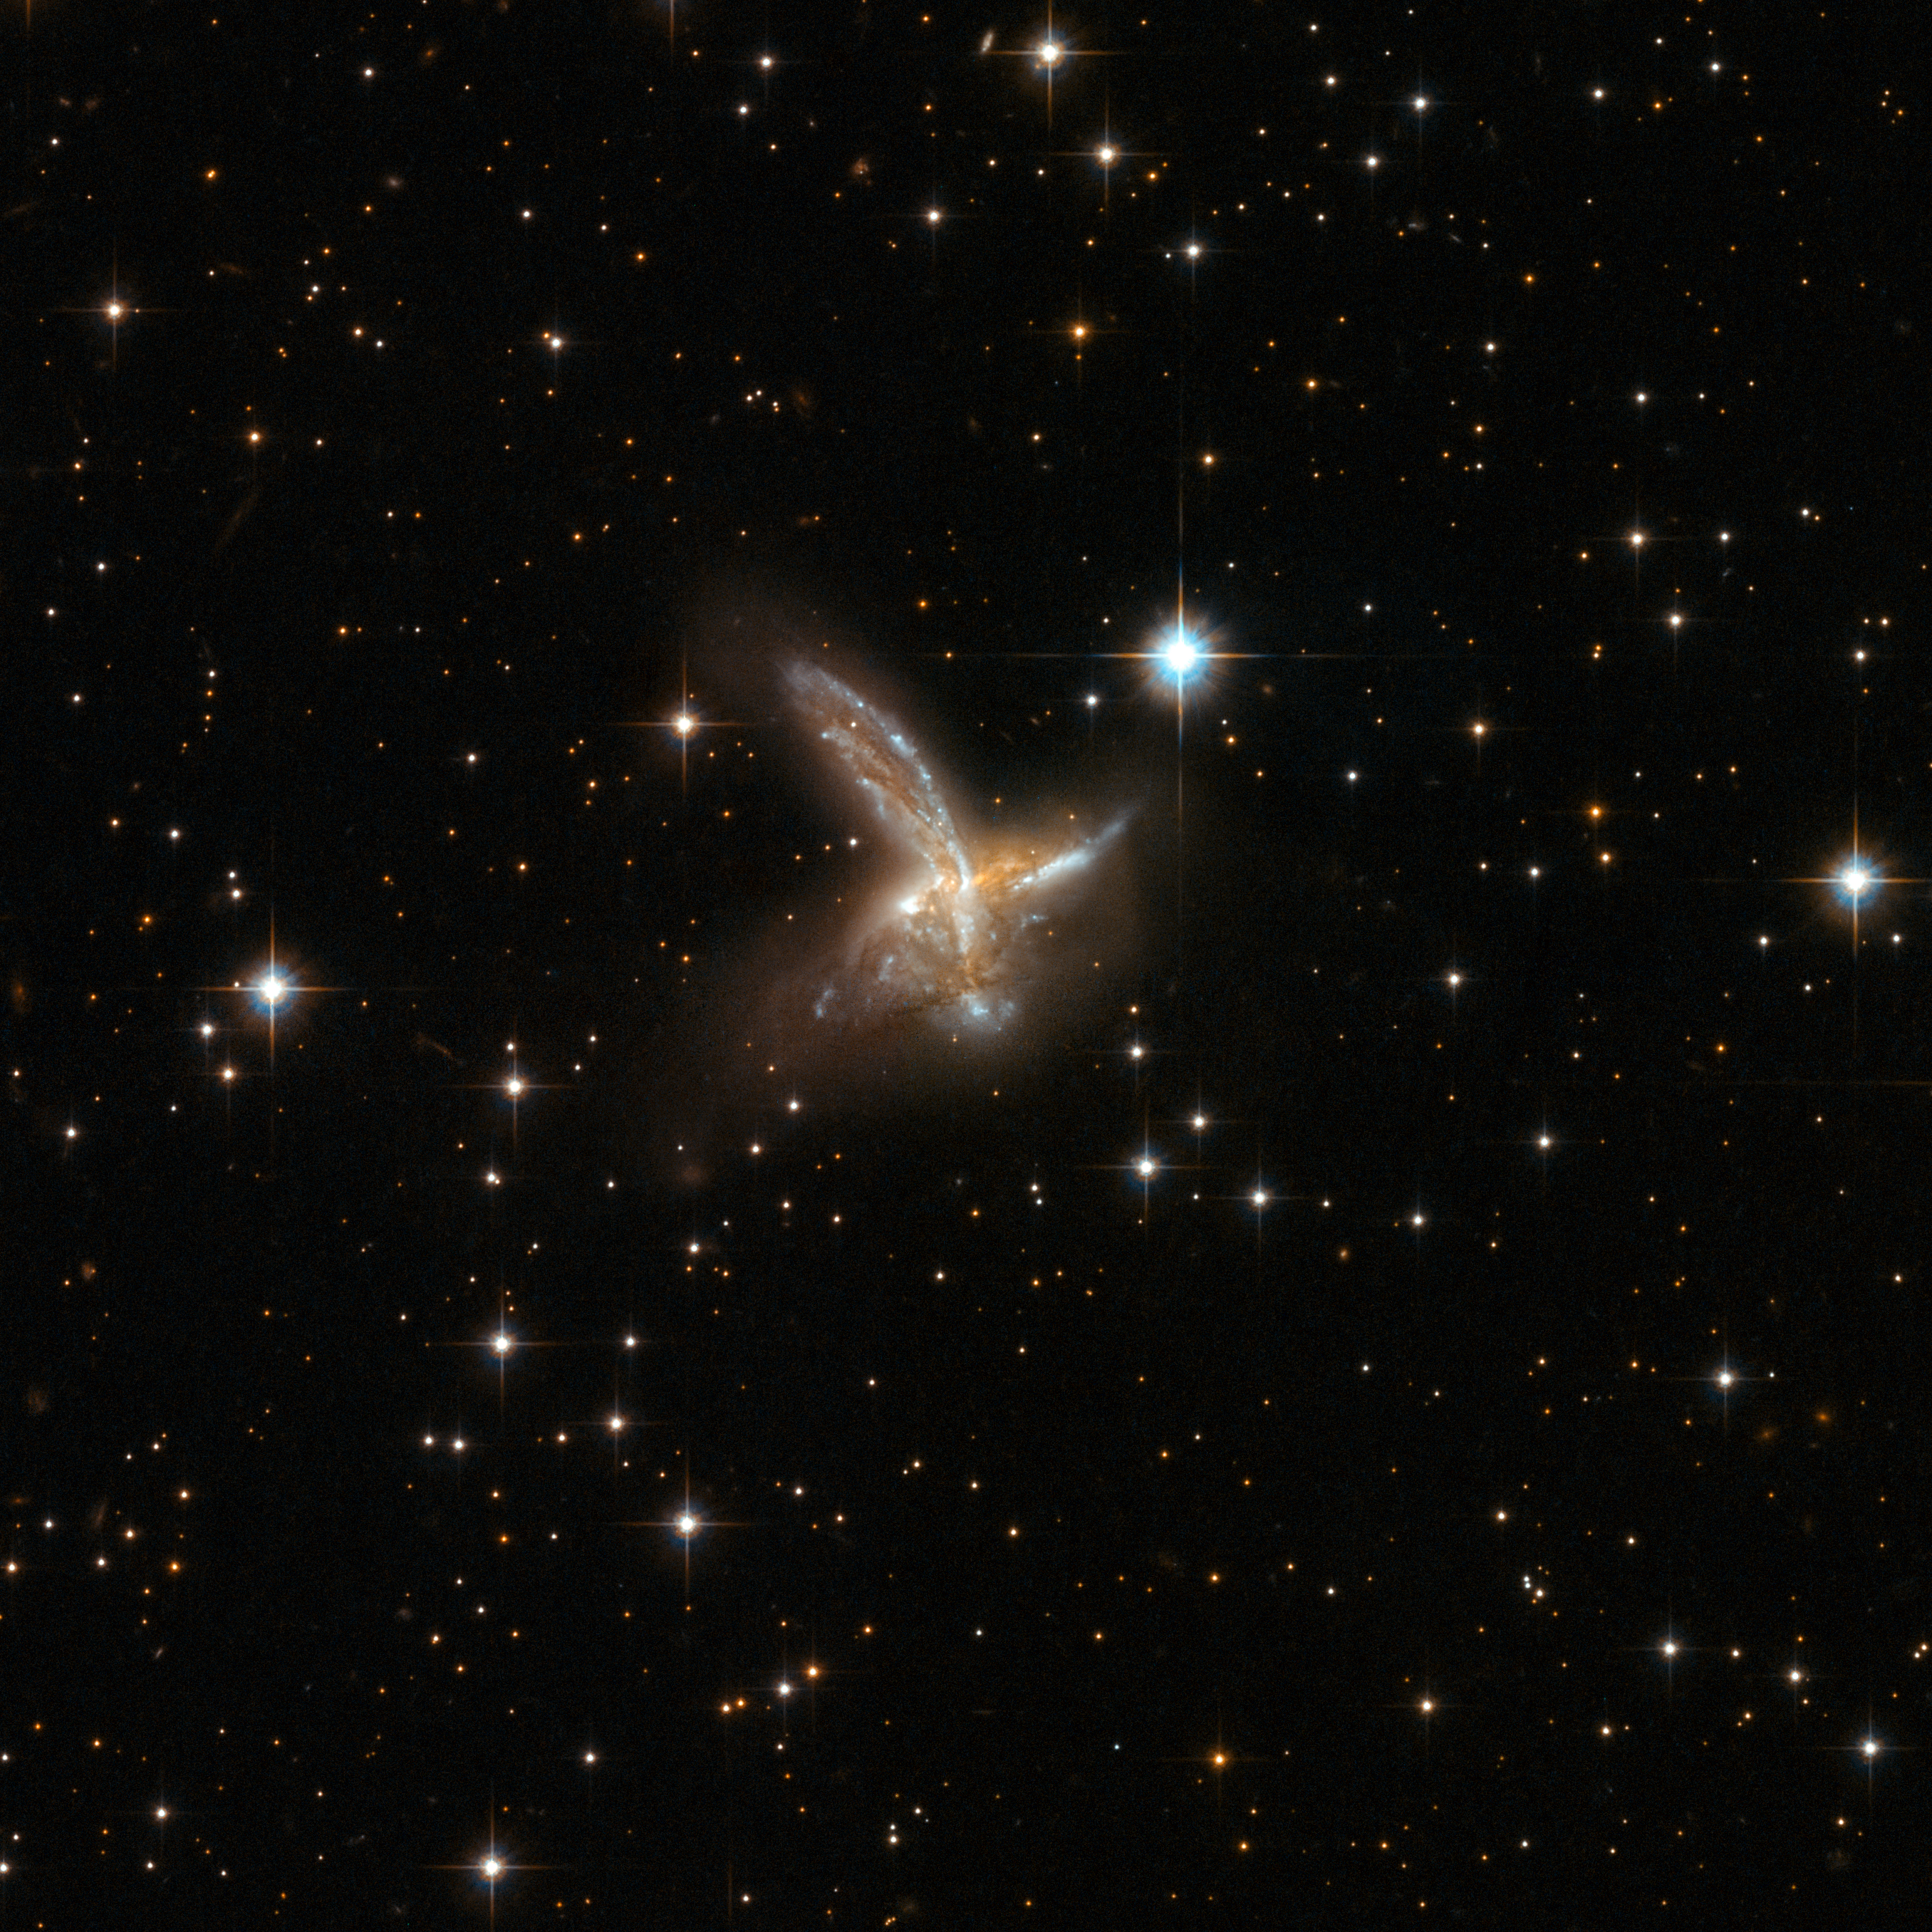

ESO 593-8

ESO 593-8 is an impressive pair of interacting galaxies with a feather-like galaxy crossing a companion galaxy. The two components will probably merge to form a single galaxy in the future. The pair is adorned with a number of bright blue star clusters. ESO 593-8 is located in the constellation of Sagittarius, the Archer, some 650 million light-years away from Earth.

This image is part of a large collection of 59 images of merging galaxies taken by the Hubble Space Telescope and released on the occasion of its 18th anniversary on 24th April 2008.

Credit: NASA, ESA, the Hubble Heritage Team (STScI/AURA)-ESA/Hubble Collaboration and A. Evans (University of Virginia, Charlottesville/NRAO/Stony Brook University)